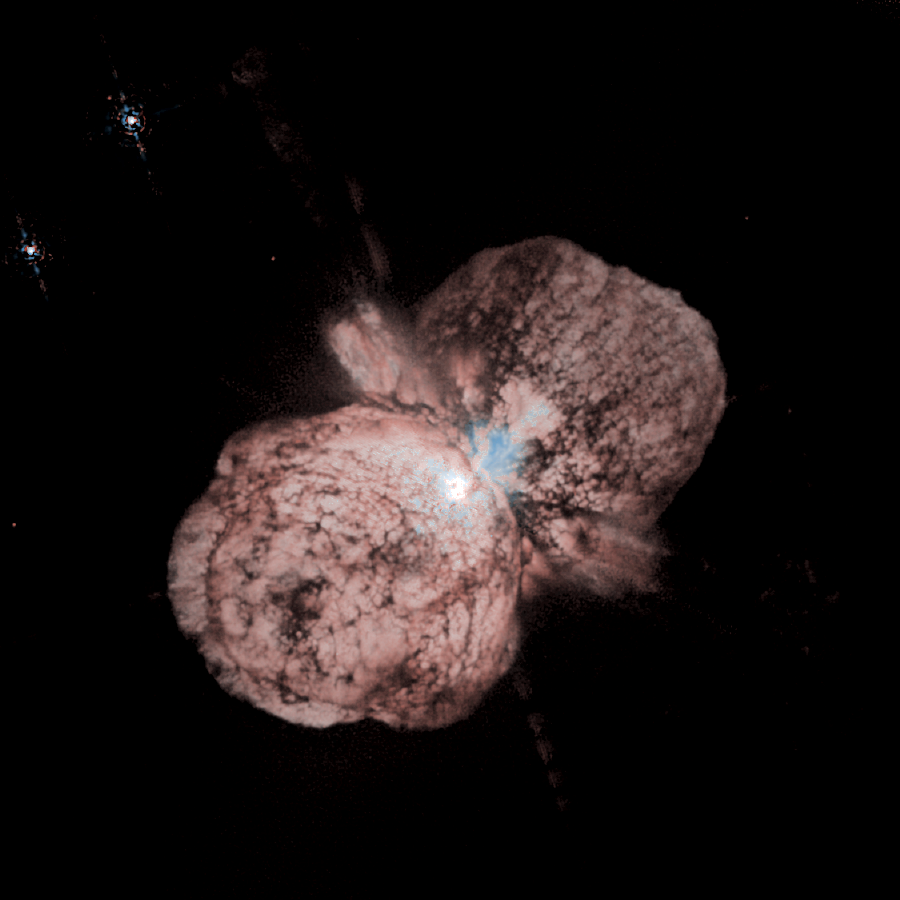

The expansion of Eta Carinae debris

A huge, billowing pair of gas and dust clouds are captured in this stunning Hubble Space Telescope image of the supermassive star Eta Carinae.

Credit: Jon Morse (University of Colorado), and NASA/ESA